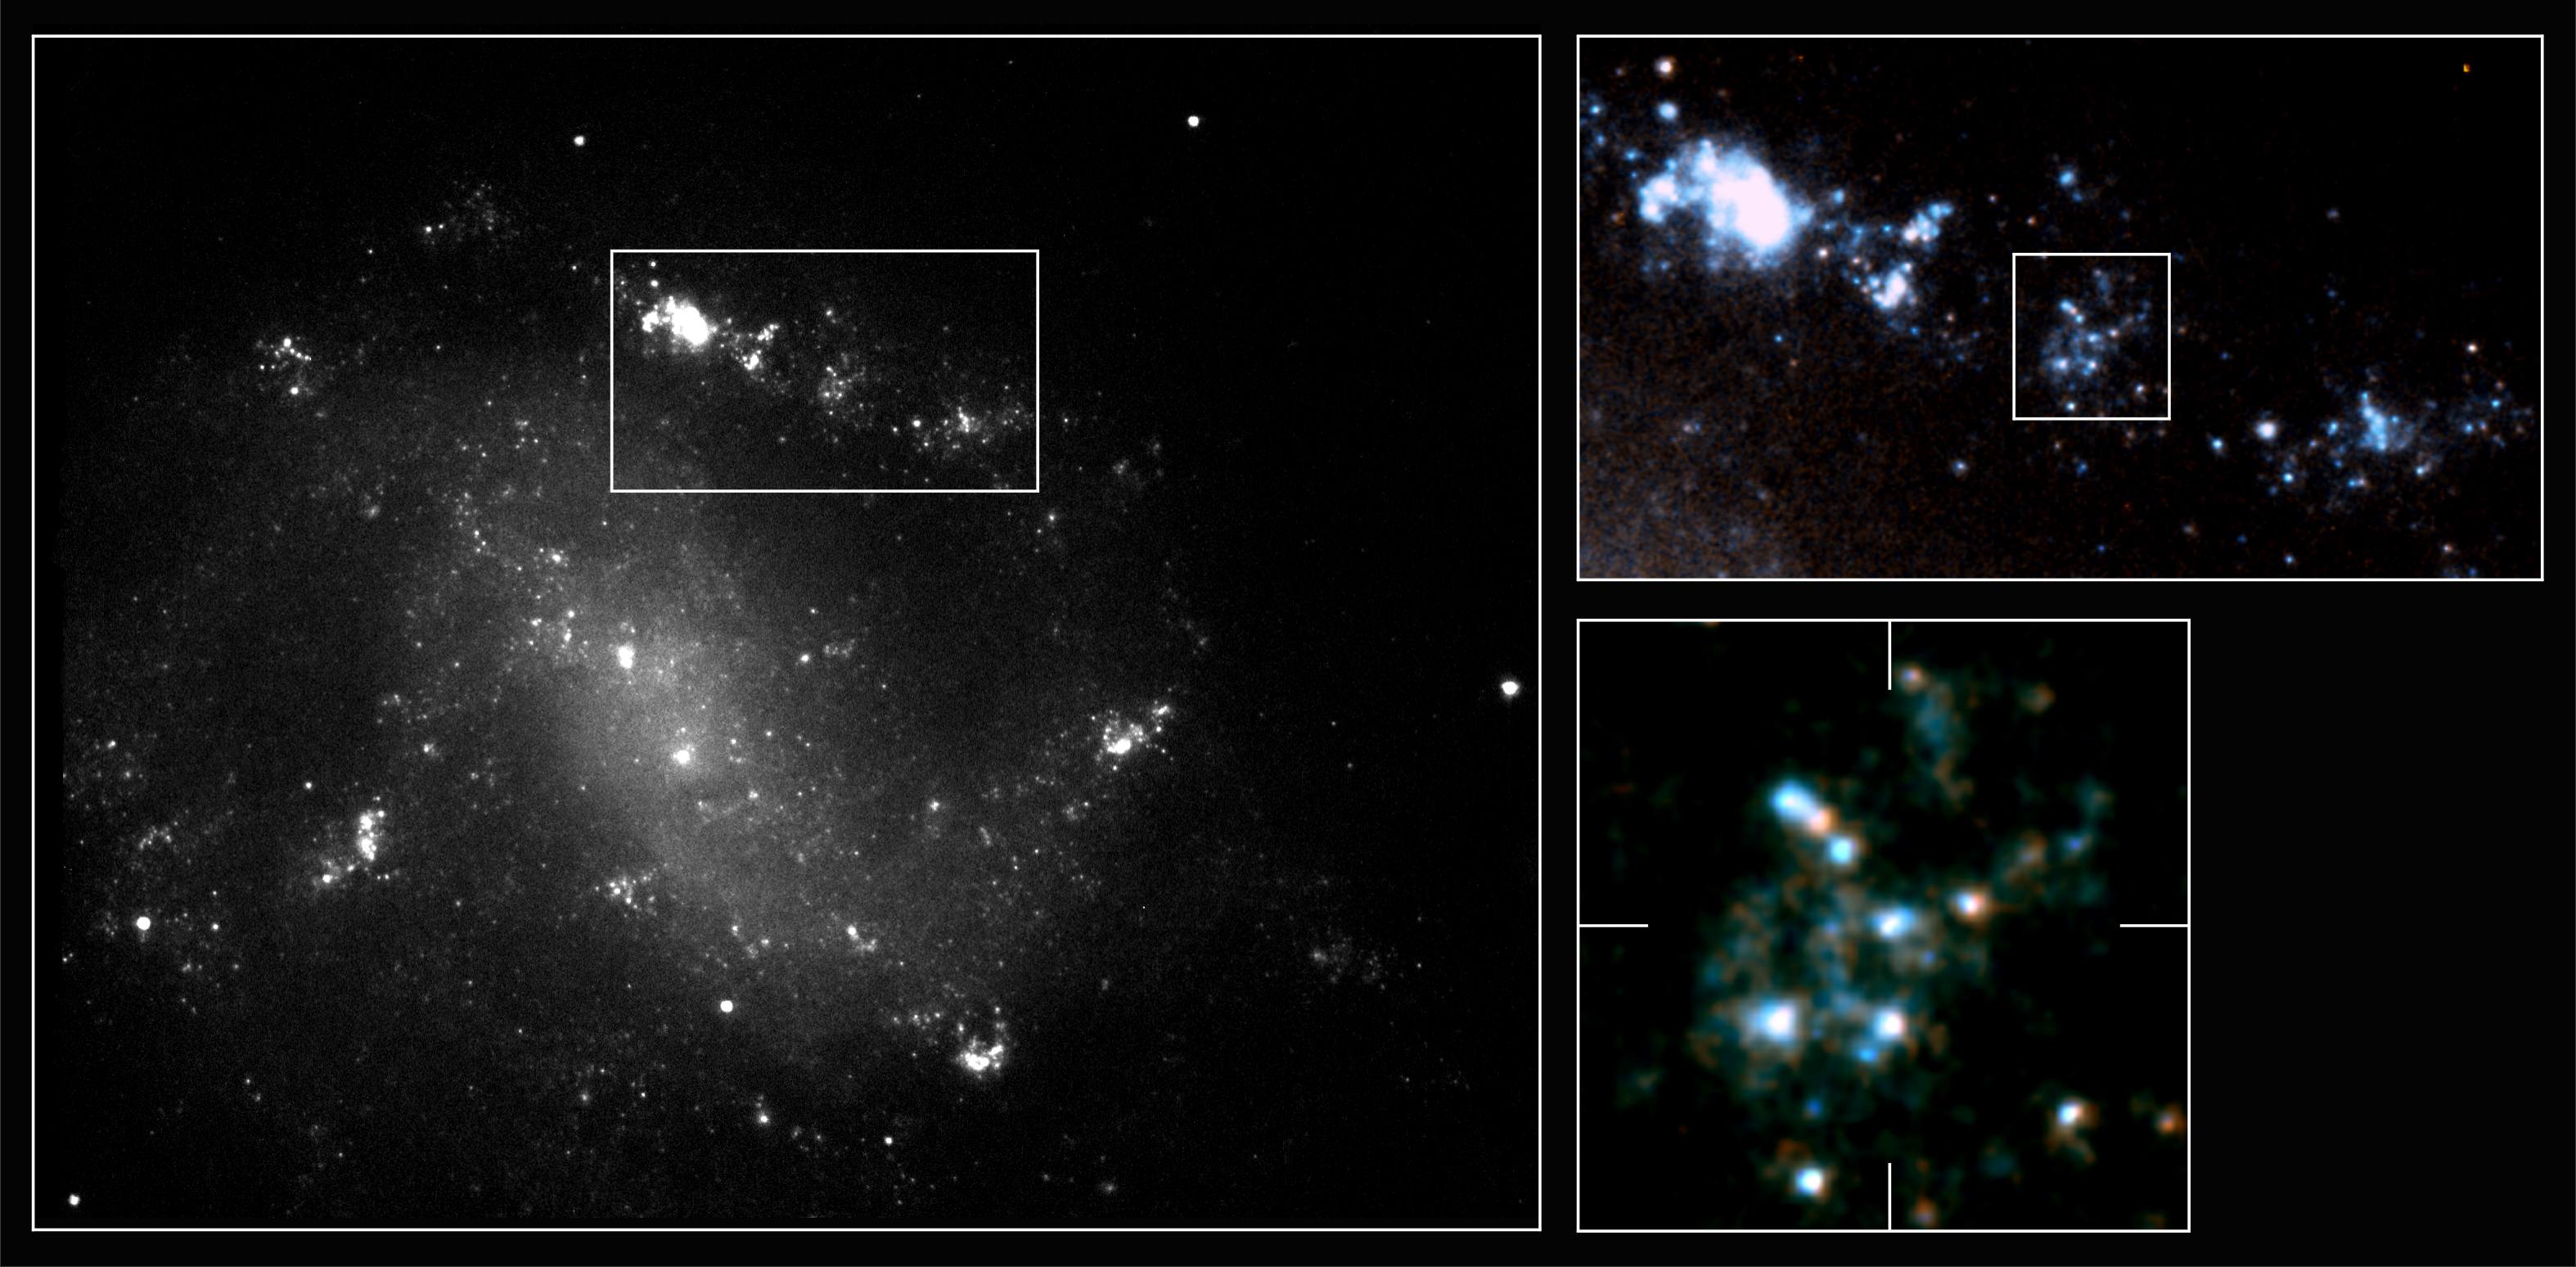

First high-resolution details in gamma-ray burst host galaxy

These images of the galaxy ESO 184-G82 are the most detailed images of a gamma-ray burst galaxy ever obtained. They were taken with the Space Telescope Imaging Spectrograph (STIS) onboard the NASA/ESA Hubble Space Telescope. The image on the left was taken with the STIS broad-band 'clear' filter. A composite image created using the same broad-band image (in blue) and an image obtained with the STIS red filter (in red) is shown on the right and details from this image are shown in the upper right and in higher detail below right.

These new Hubble observations reveal that the host galaxy is actively star-forming and contains numerous clouds of hydrogen and regions teeming with activity from newly born hot stars. The galaxy is a spiral with loosely wound spiral arms and a large bar of gas and dust running through the centre.

The sharpness of the Hubble Space Telescope's vision has enabled astronomers to discover that the gamma-ray burst and the supernova occurred in an active region in one of the galaxy's spiral arms. Here an underlying hydrogen gas complex is overlaid with several bright red giant stars. At the exact position of the gamma-ray burst (marked with lines on the lower right image) a very compact source of emission is seen. Most of this emission is probably the last remnant of the fading light from the supernova itself, but the scientists suspect that a faint underlying star cluster may contribute as well.

This is a very important step forward in our understanding of gamma-ray bursts and their immediate surroundings and offers possible clues to their progenitors.

The Hubble observations were carried out 12 June 2000. The colour composite was constructed from two exposures combined in chromatic order: 1240 seconds through the clear filter (in blue), and 1185 seconds through a red filter (in red). The fields of view of the three images clockwise are 45x35 arcseconds, 13x7 arcseconds and 2x2arcseconds.

Credit: ESA, Stephen Holland (Danish Centre for Astrophysics with the HST), Jens Hjorth, Johan Fynbo (University of Copenhagen)